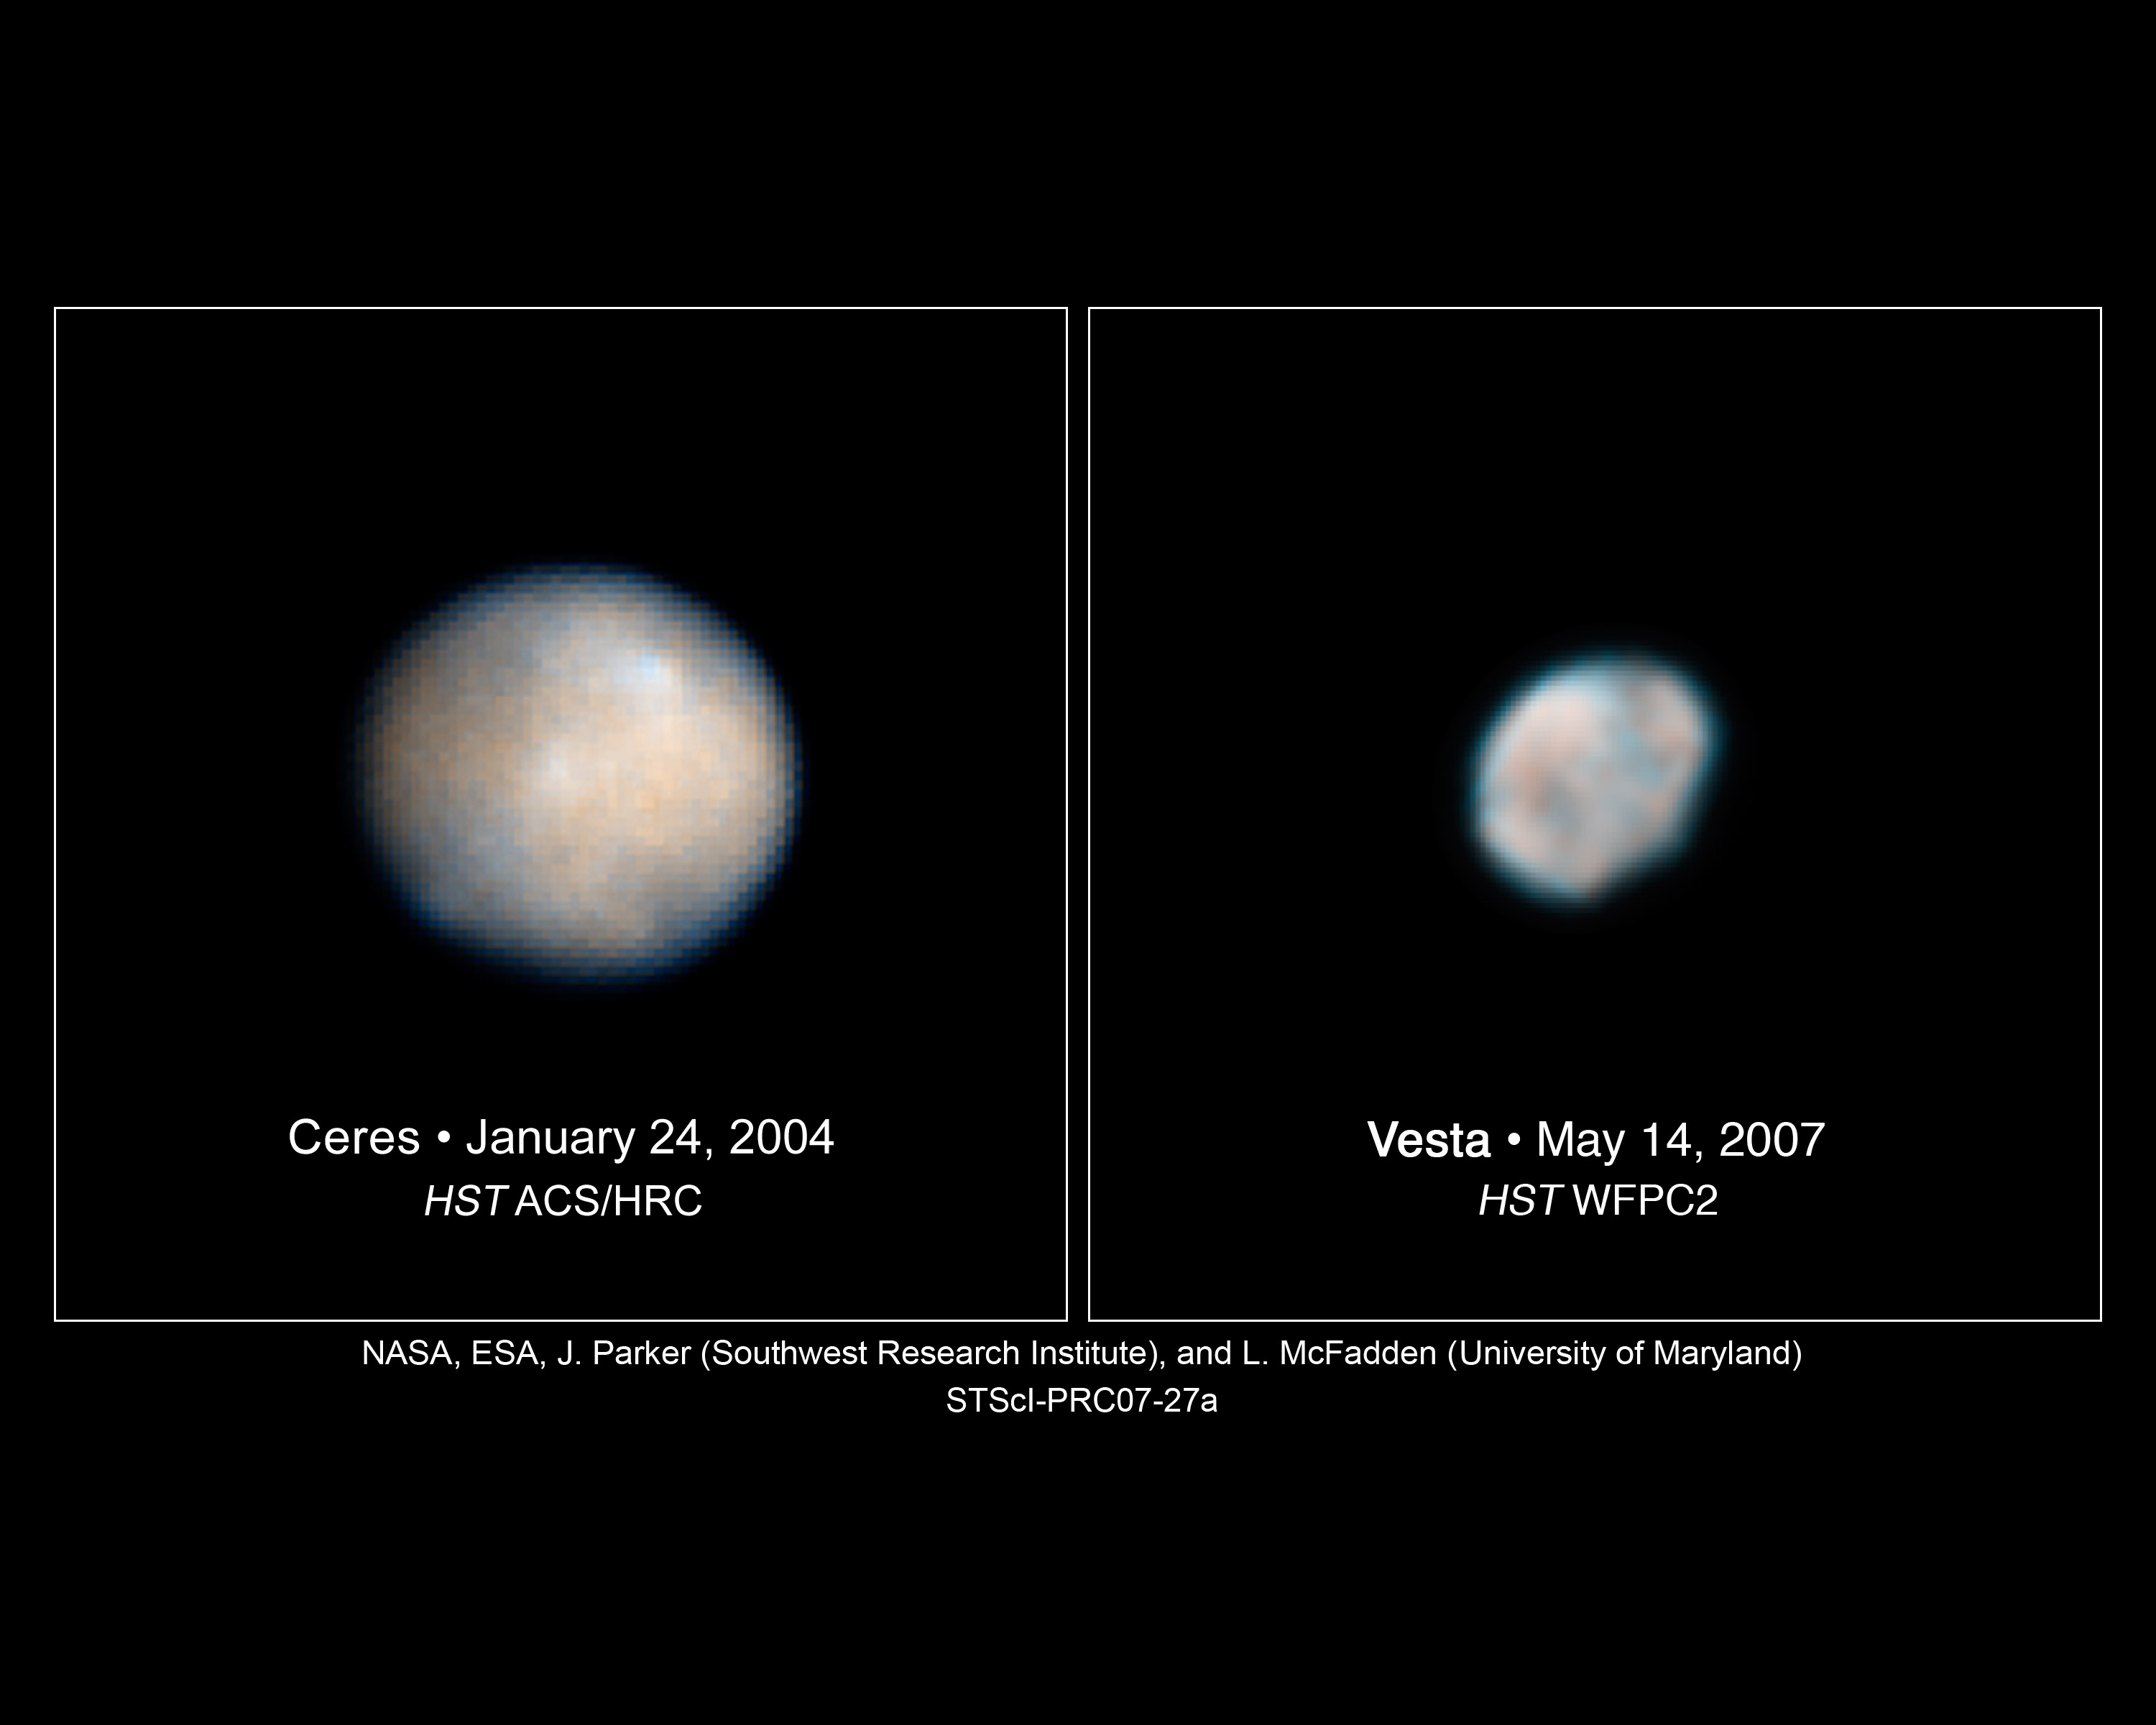

Hubble Images of Asteroids Help Astronomers Prepare for Spacecraft Visit

These Hubble Space Telescope images of Vesta and Ceres show two of the most massive asteroids in the asteroid belt, a region between Mars and Jupiter. The images are helping astronomers plan for the Dawn spacecraft's tour of these hefty asteroids.

Credits for Vesta: NASA; ESA; L. McFadden and J.Y. Li (University of Maryland, College Park); M. Mutchler and Z. Levay (Space Telescope Science Institute, Baltimore); P. Thomas (Cornell University); J. Parker and E.F. Young (Southwest Research Institute); and C.T. Russell and B. Schmidt (University of California, Los Angeles)
Credits for Ceres: NASA; ESA; J. Parker (Southwest Research Institute); P. Thomas (Cornell University); L. McFadden (University of Maryland, College Park); and M. Mutchler and Z. Levay (Space Telescope Science Institute)